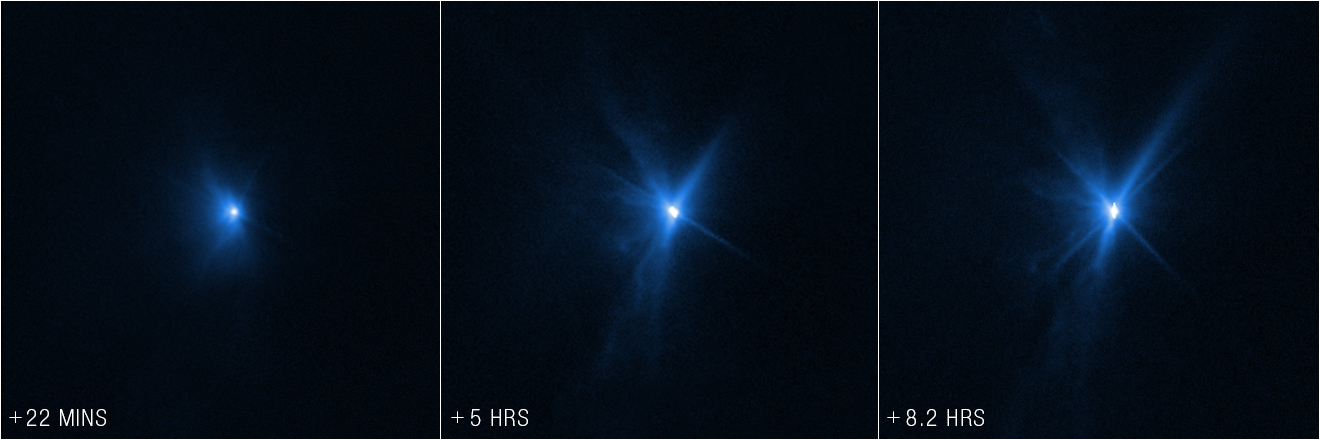

Hubble Captures DART Debris (27 September 2022)

These images from the NASA/ESA Hubble Space Telescope, taken 22 minutes, 5 hours, and 8.2 hours after NASA’s Double Asteroid Redirection Test (DART) intentionally impacted Dimorphos, show expanding plumes of ejecta from the asteroid’s body. This event was the world’s first test of the kinetic impact technique using a spacecraft to deflect an asteroid by modifying its orbit.

The Hubble images show ejecta from the impact that appear as rays stretching out from the body of the asteroid. The bolder, fanned-out spike of ejecta to the left of the asteroid is in the general direction from which DART approached. In the Hubble images, astronomers estimate that the brightness of the Didymos system increased by 3 times after impact. They’re also particularly intrigued by how that brightness then held steady, even eight hours after impact.

These observations, when combined with data from the NASA/ESA/CSA James Webb Space Telescope, will allow scientists to gain knowledge about the nature of the surface of Dimorphos, how much material was ejected by the collision, how fast it was ejected, and the distribution of particle sizes in the expanding dust cloud.

Hubble will observe Dimorphos ten more times over the next three weeks to monitor how the ejecta cloud expands and fades over time.

Hubble observations were conducted in one filter, WFC3/UVIS F350LP, and assigned the colour blue.

Credit: NASA, ESA, and STScI